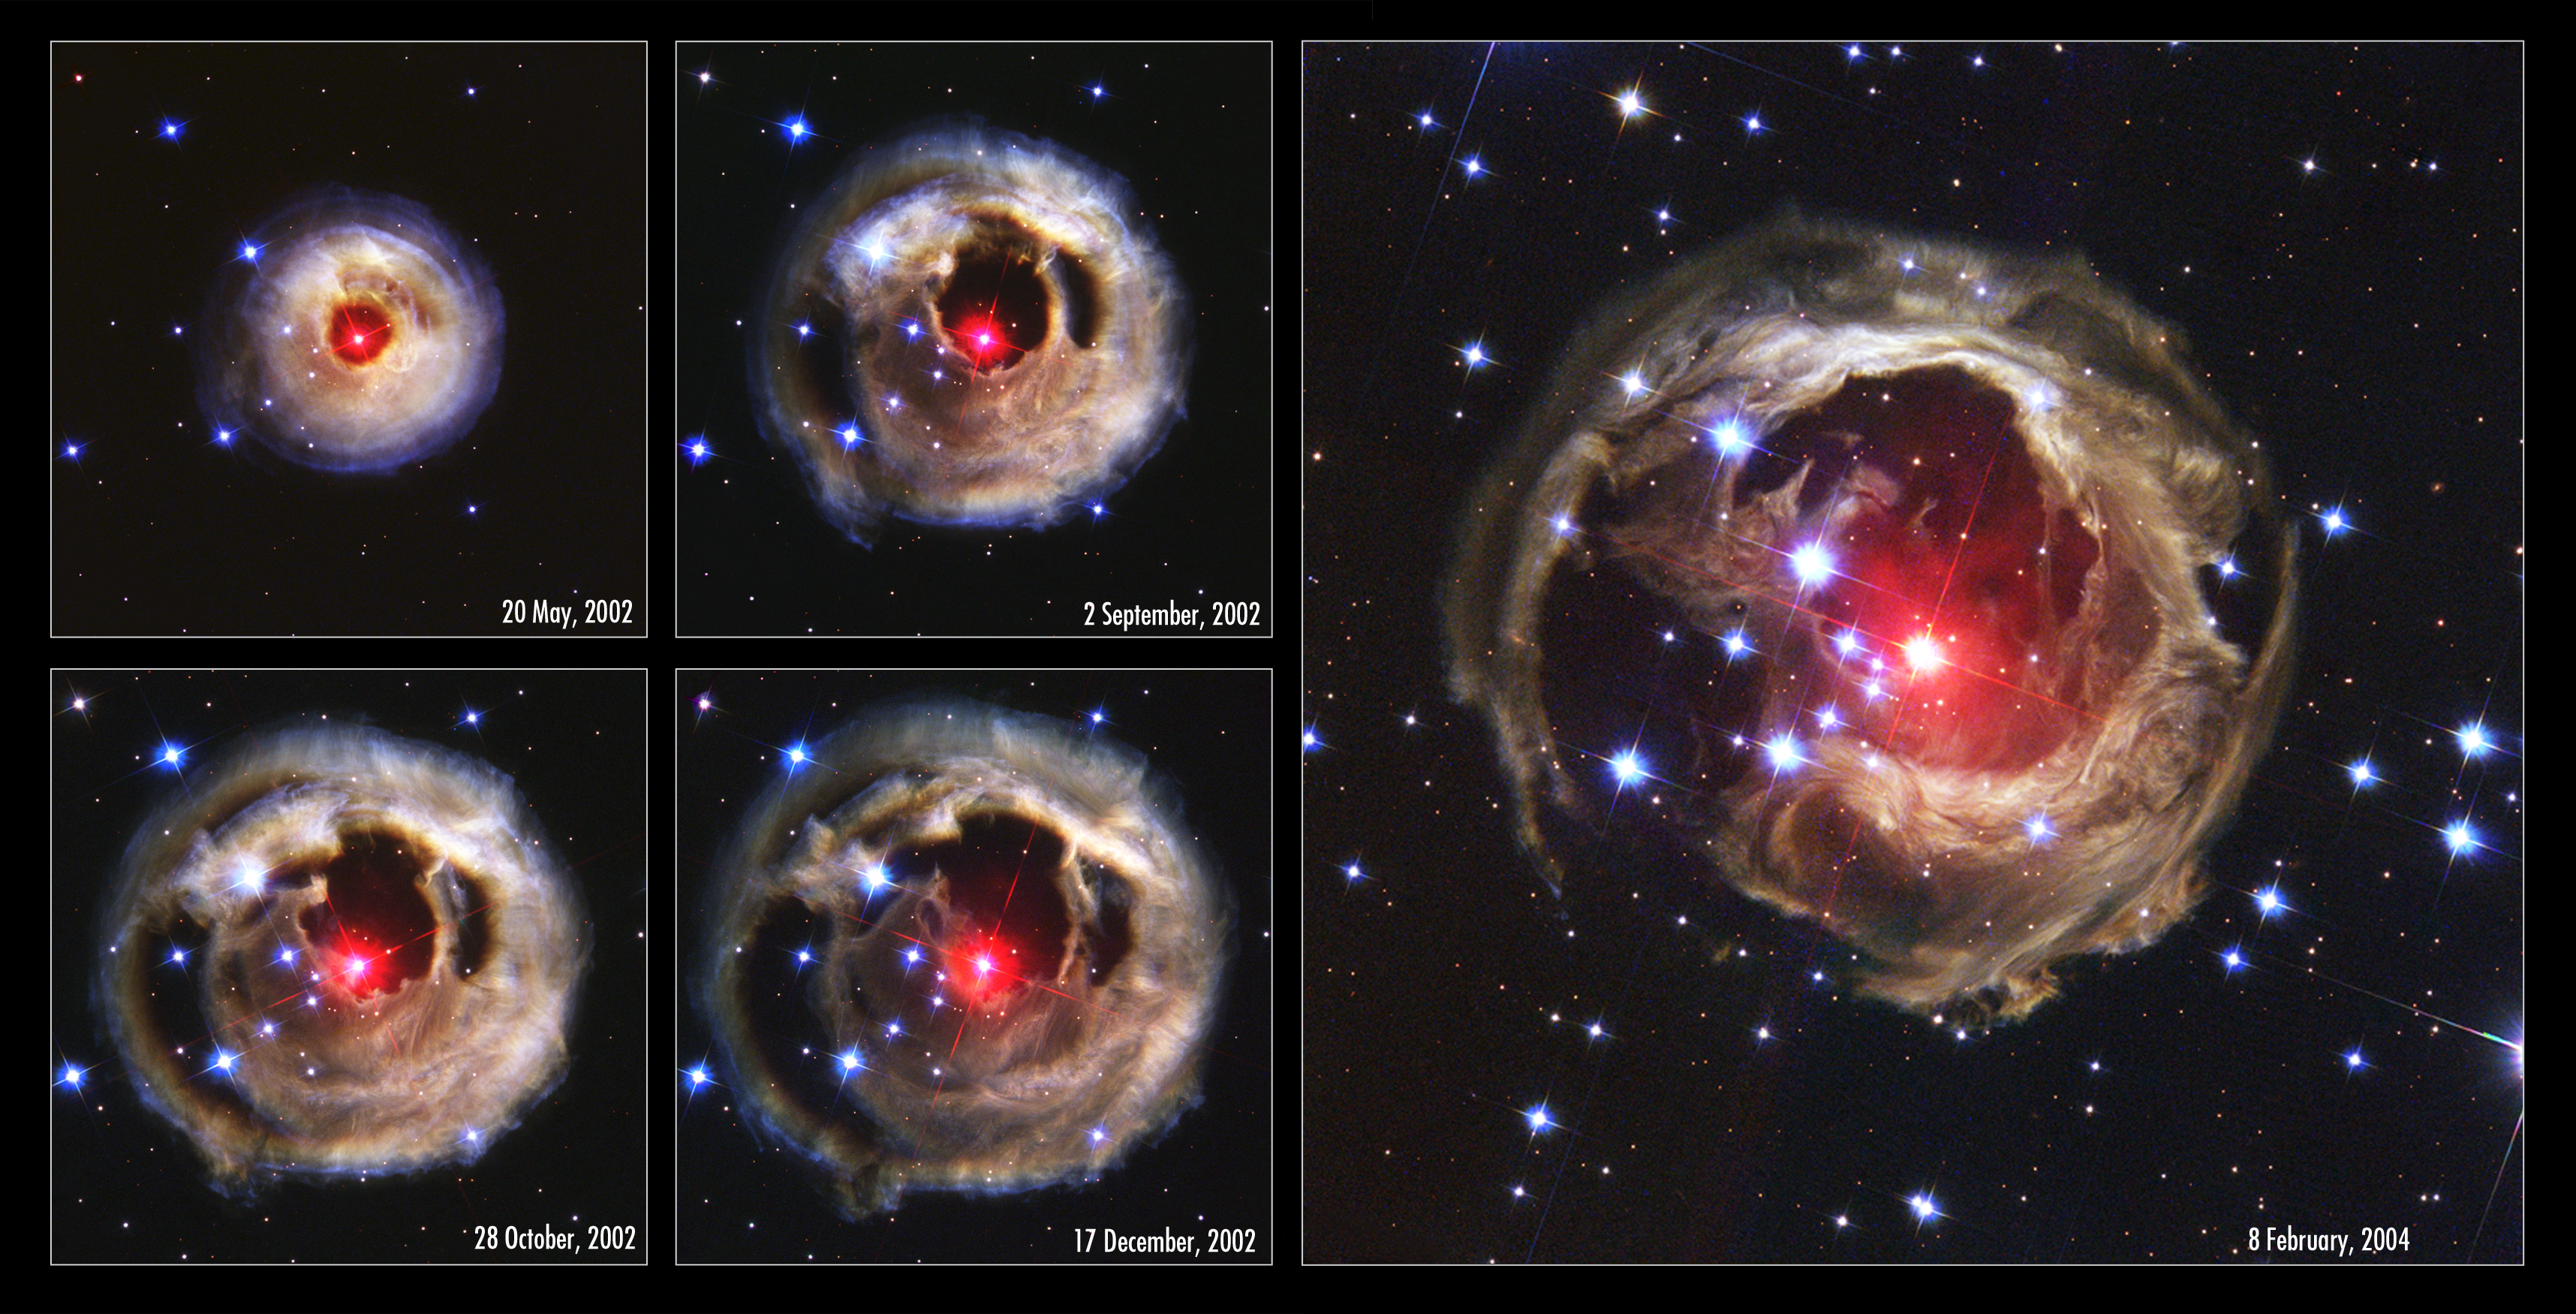

V838 Monocerotis revisited: Space phenomenon imitates art [chronological overview]

"Starry Night", Vincent van Gogh's famous painting, is renowned for its bold whorls of light sweeping across a raging night sky. Although this image of the heavens came only from the artist's restless imagination, a new picture from the NASA/ESA Hubble Space Telescope bears remarkable similarities to the van Gogh work, complete with never-before-seen spirals of dust swirling across trillions of kilometres of interstellar space.

This image, obtained with the Advanced Camera for Surveys on February 8, 2004, is Hubble's latest view of an expanding halo of light around a distant star, named V838 Monocerotis (V838 Mon). The illumination of interstellar dust comes from the red supergiant star at the middle of the image, which gave off a flashbulb-like pulse of light two years ago. V838 Mon is located about 20,000 light-years away from Earth in the direction of the constellation Monoceros, placing the star at the outer edge of our Milky Way galaxy.

Credit: NASA, the Hubble Heritage Team (AURA/STScI) and ESA